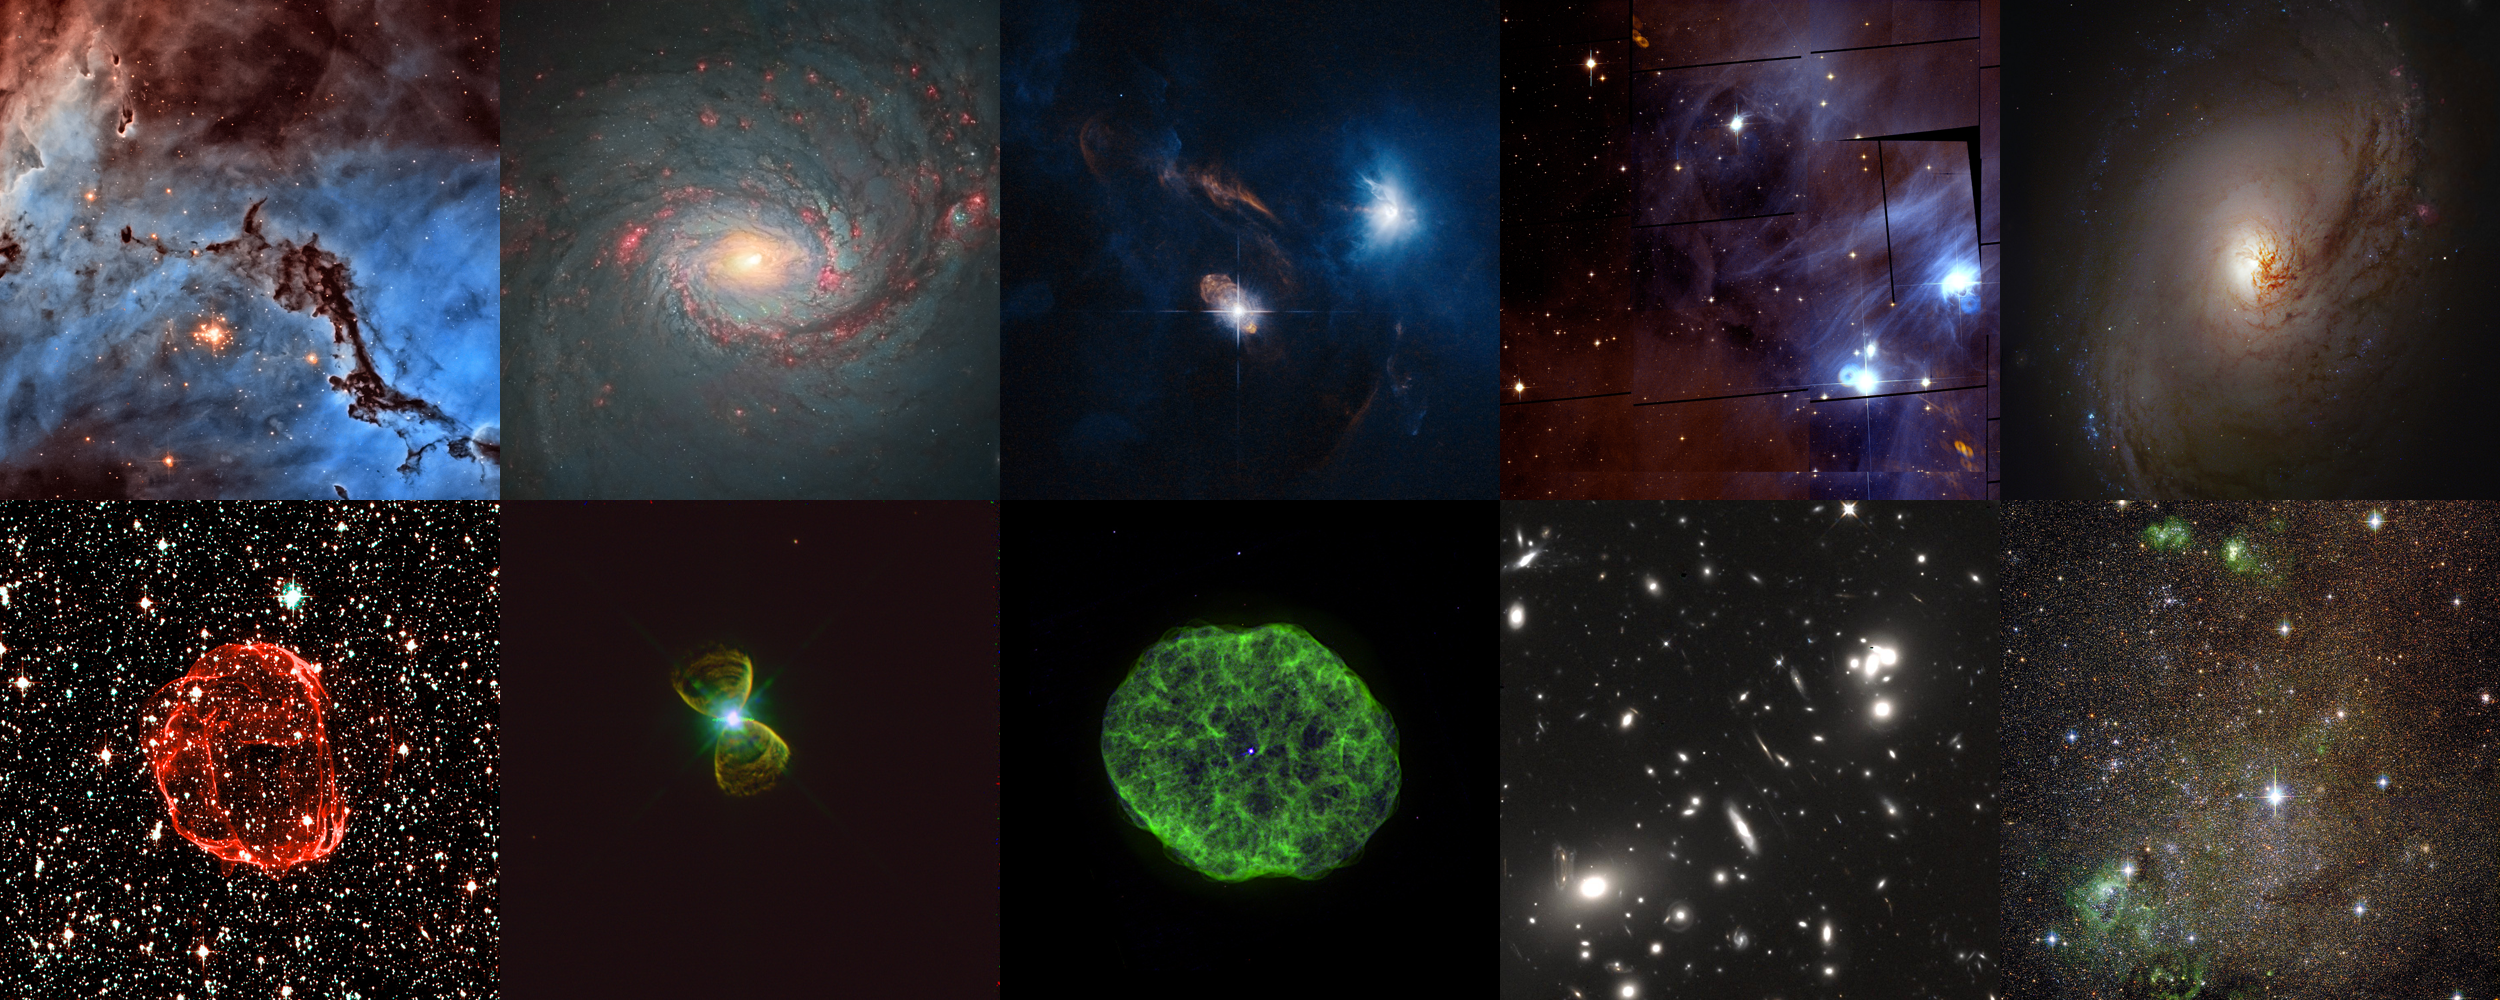

Collage of top images in the Hidden Treasures image processing competition

This image shows the top ten images entered into the Hubble's Hidden Treasures image processing competition:

Top row: NGC 1763 by Josh Lake, M 77 by Andre van der Hoeven, XZ Tauri by Judy Schmidt, Chamaeleon I by Renaud Houdinet, M 96 by Robert Gendler

Bottom row: SNR 0519-69 by Claude Cornen, PK 111-2.1 by Josh Barrington, NGC 1501 by kyokugaisha1, Abell 68 by Nick Rose, IC 10 by Nikolaus Sulzenauer

Credit: NASA & ESA